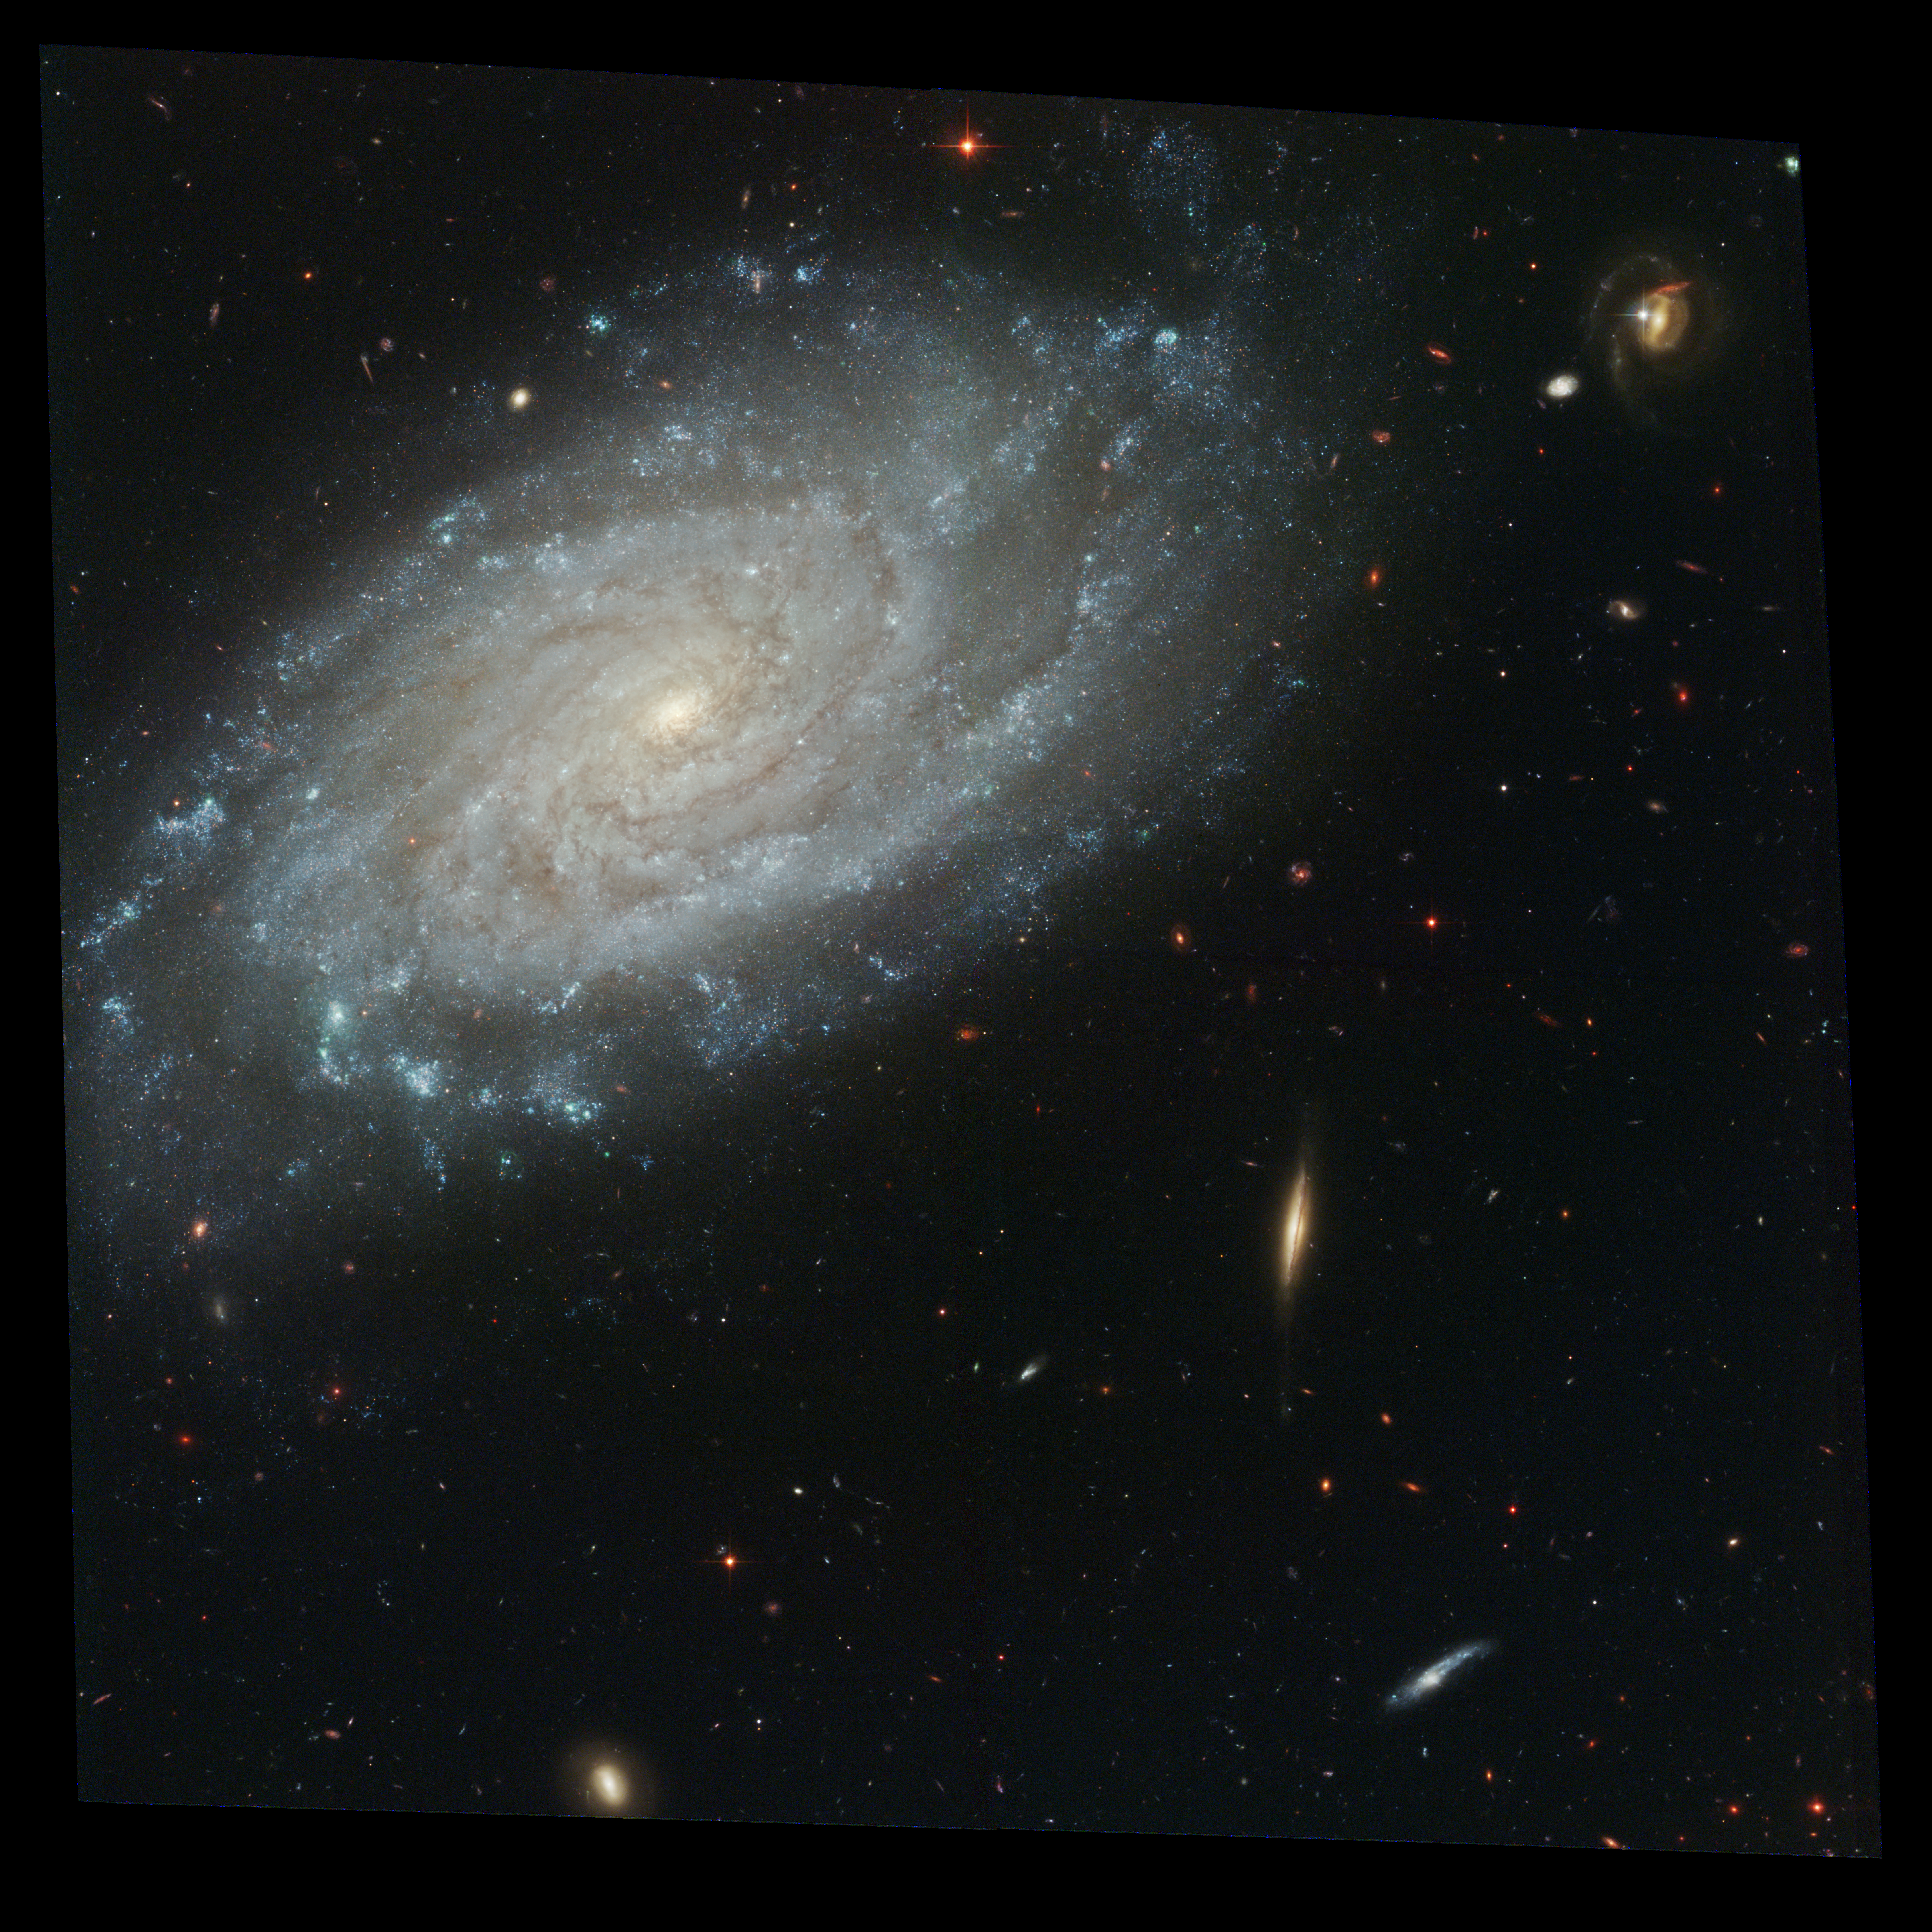

Full ACS Image of NGC 3370

Amid a backdrop of far-off galaxies, the majestic dusty spiral, called NGC 3370, looms in the foreground in this NASA Hubble Space Telescope image. Observations show an intricate spiral arm structure spotted with hot areas of new star formation. But this galaxy is more than just a pretty face. Nearly 10 years earlier NGC 3370, in the constellation Leo, hosted a bright exploding star.

Credit: NASA/ESA, The Hubble Heritage Team and A. Riess (STScI)